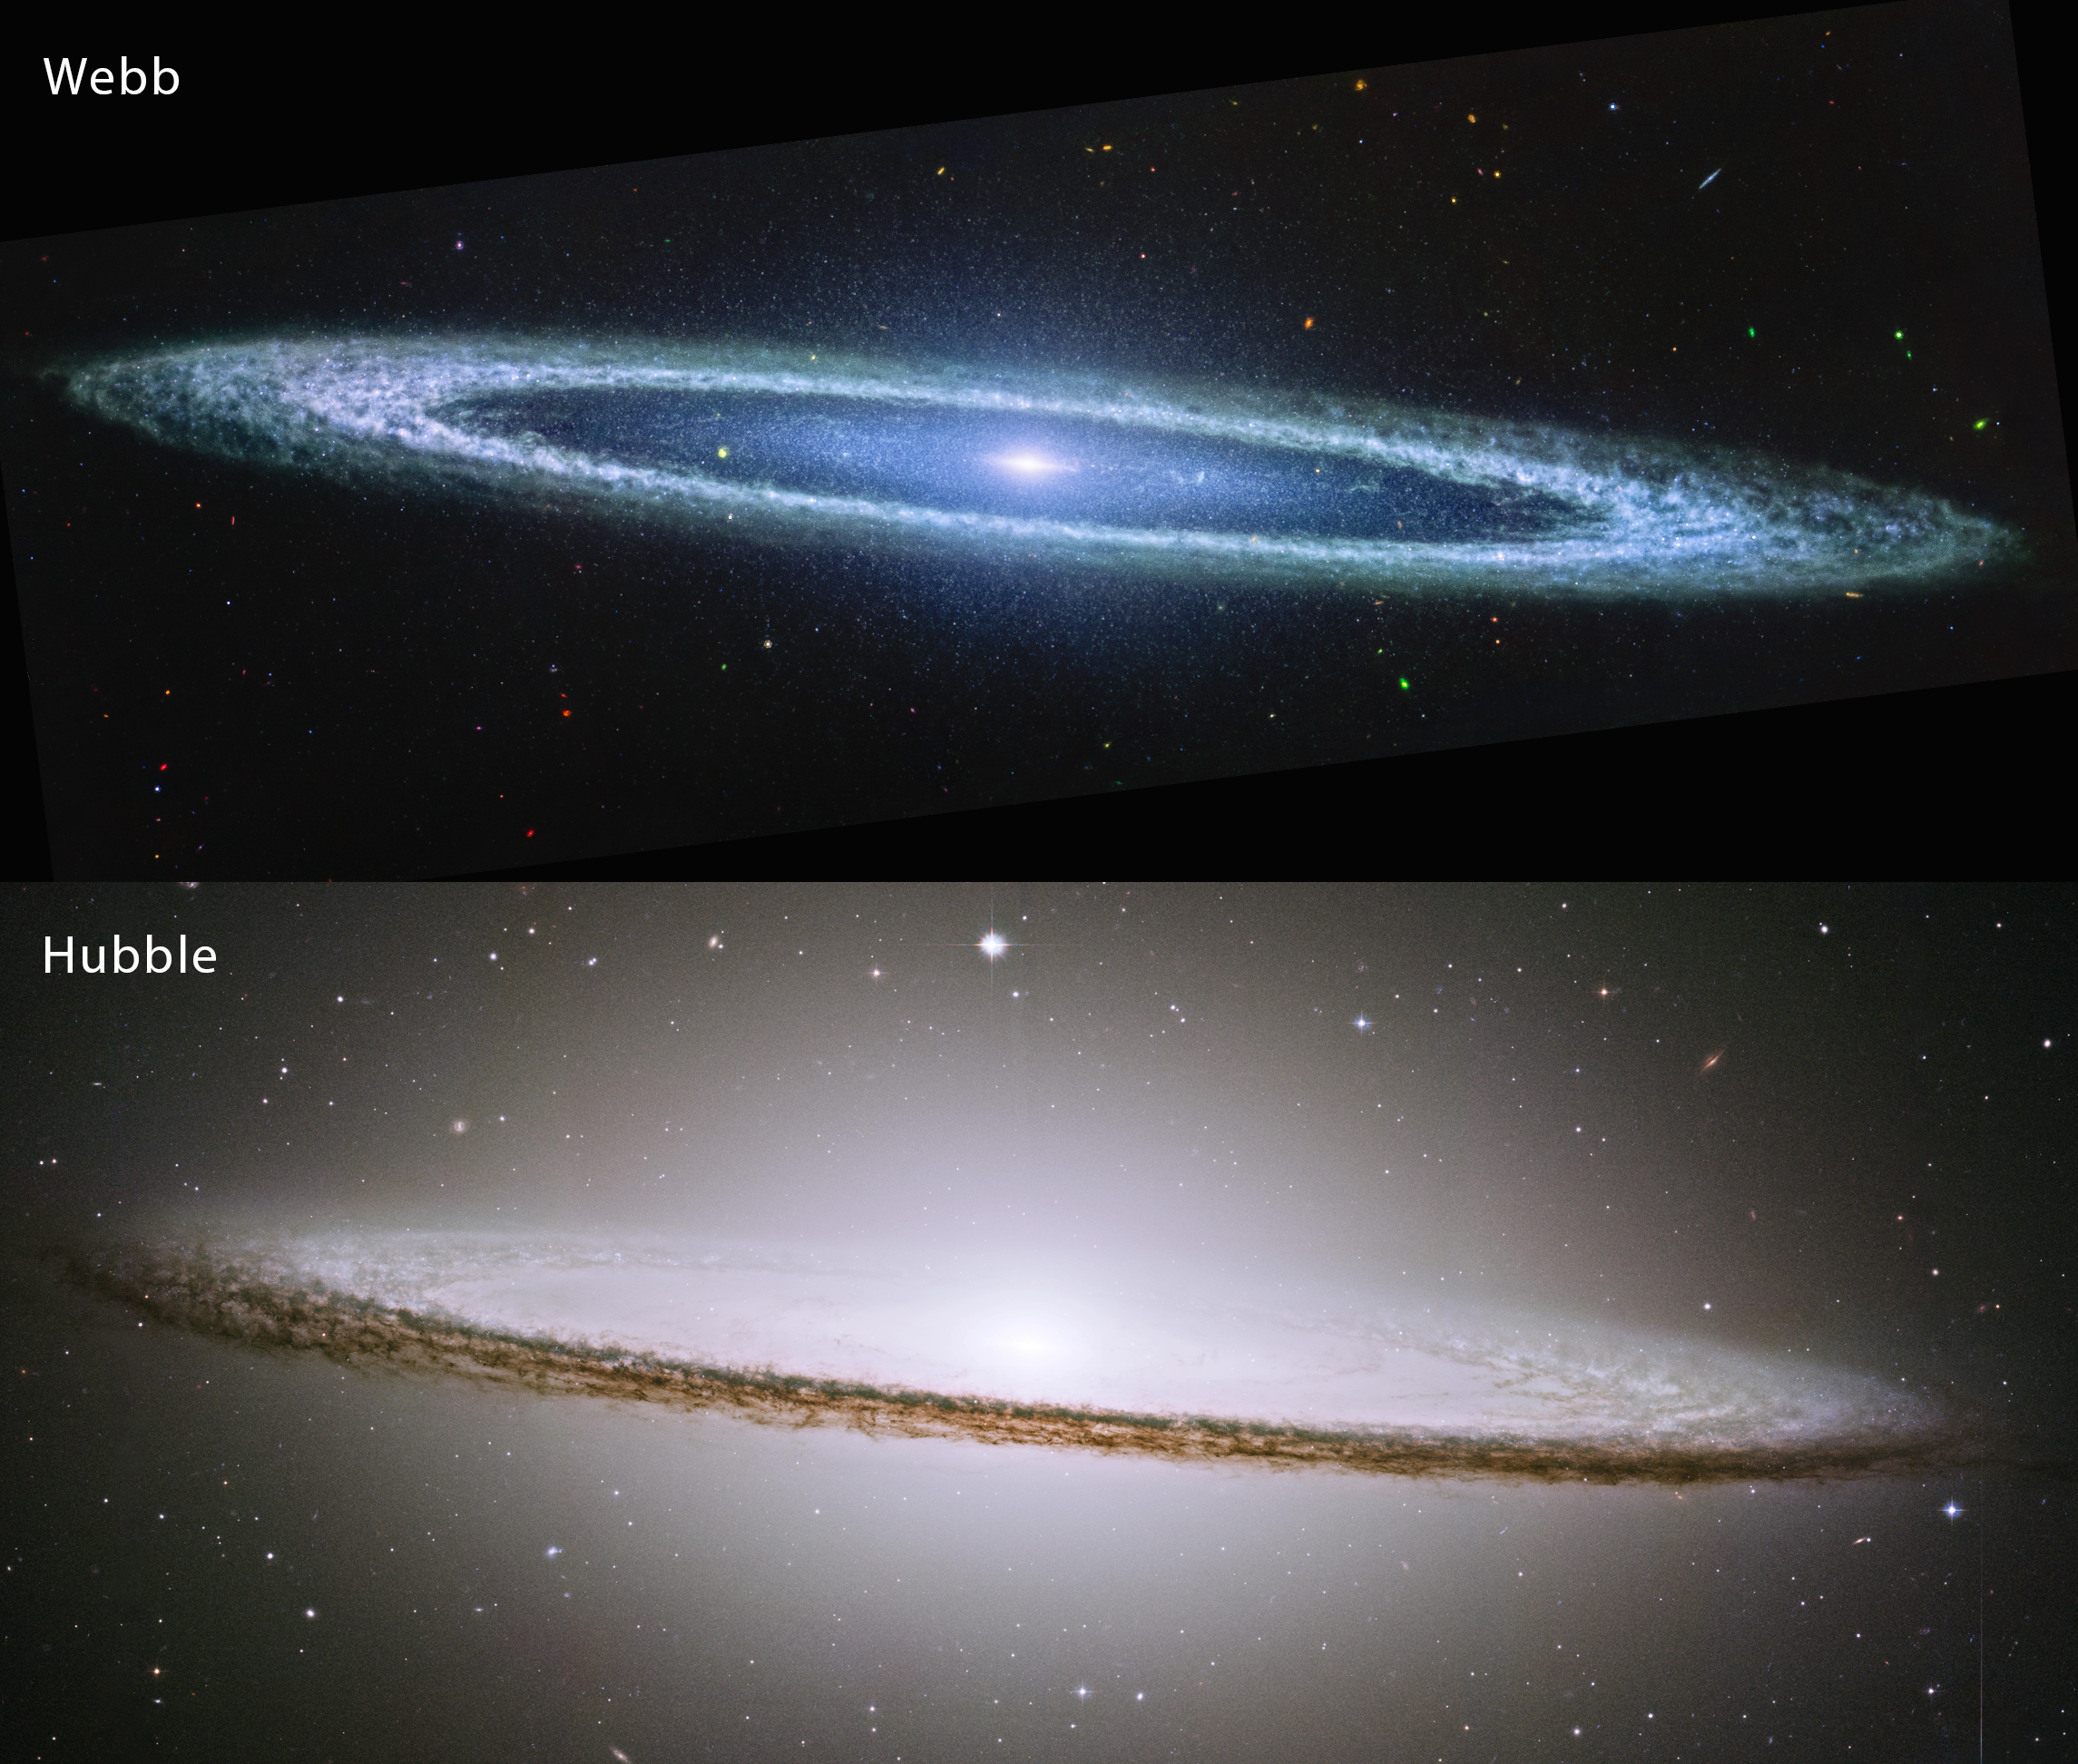

Hubble and Webb’s views of the Sombrero Galaxy

This image compares the view of the famous Sombrero Galaxy in mid-infrared light (top) and visible light (bottom). The James Webb Space Telescope’s MIRI (Mid-Infrared Instrument) reveals the smooth inner disk of the galaxy, while the Hubble Space Telescope’s visible light image shows the large and extended glow of the central bulge of stars.

Both the Webb and Hubble images resolve the clumpy nature of the dust that makes up the Sombrero galaxy’s outer ring.

Credit: NASA, ESA, CSA, STScI, Hubble Heritage Team (STScI/AURA)